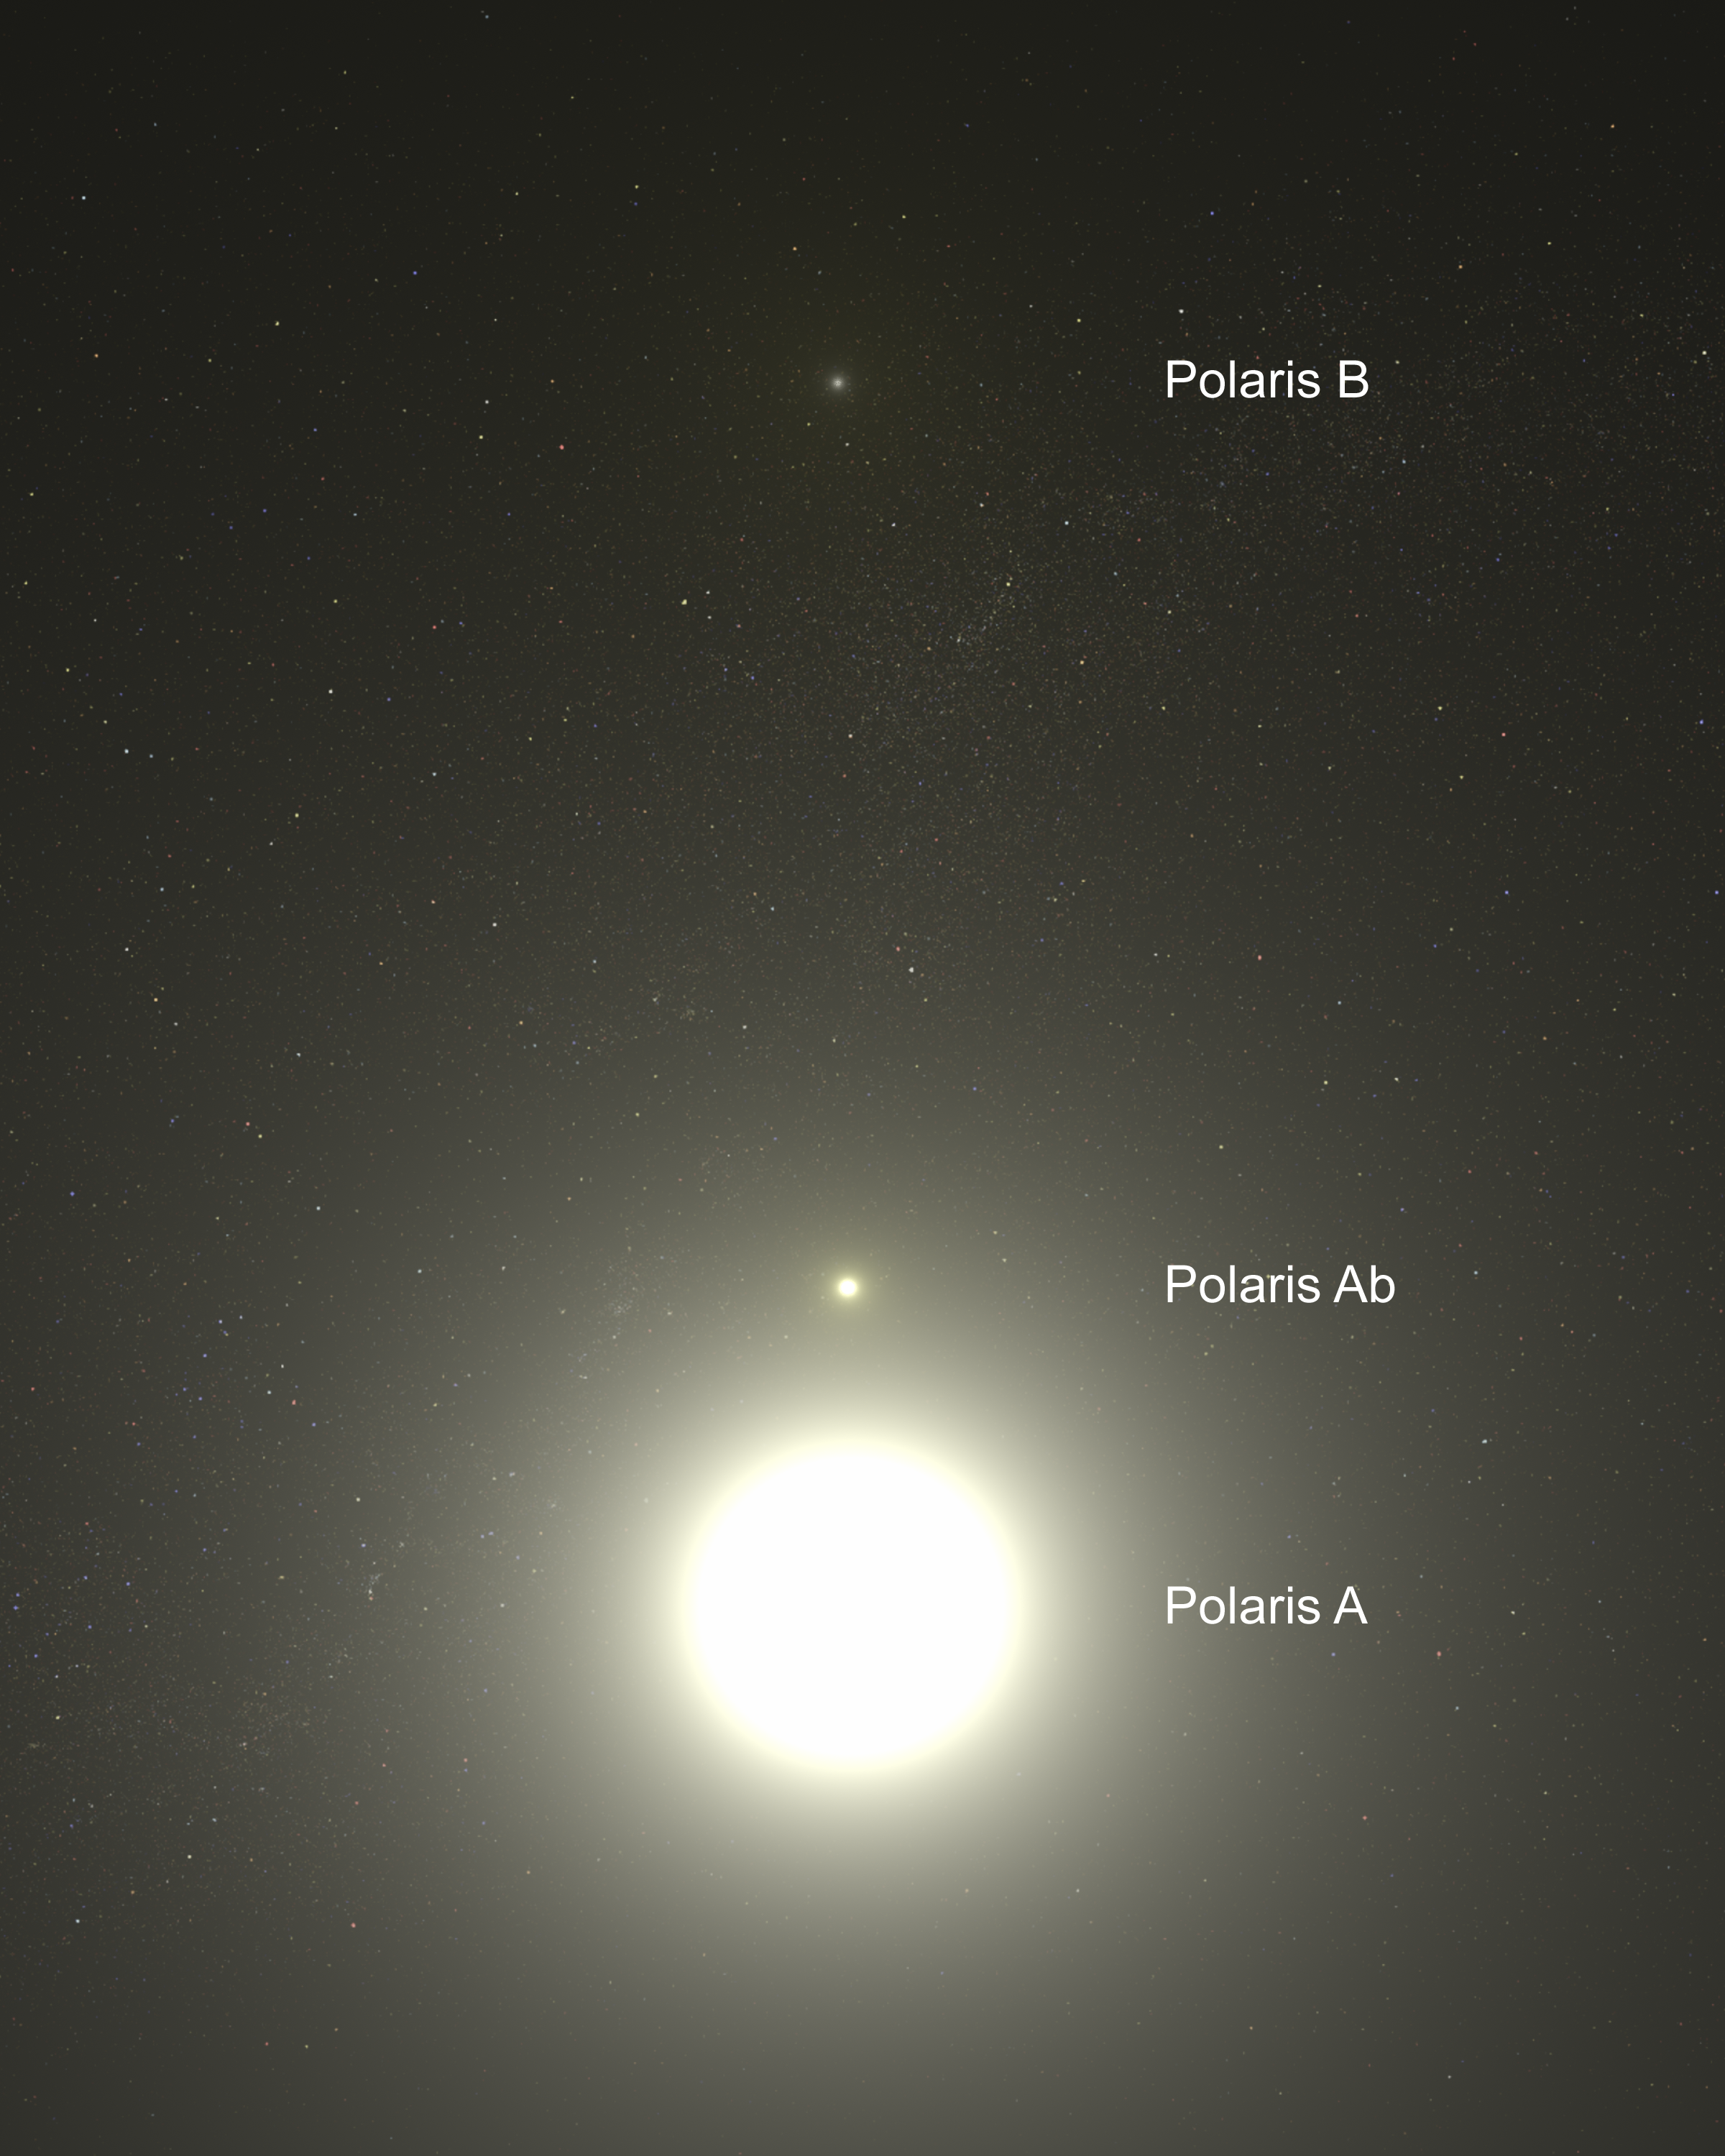

Artist's Concept of Polaris System - Annotated

This is a view from within the Polaris triple star system. The North Star, Polaris A is a bright supergiant variable star.

Just above Polaris is a small companion, Polaris Ab, which is 2 billion miles from Polaris. Much farther away, near the top of the illustration, is the wide companion Polaris B. Polaris B is located approximately 240 billion miles (about 386 billion kiloometres) from Polaris A. The two companion stars are the same temperature as Polaris A, but are dwarf stars.

Credit: NASA, ESA, G. Bacon (STScI)